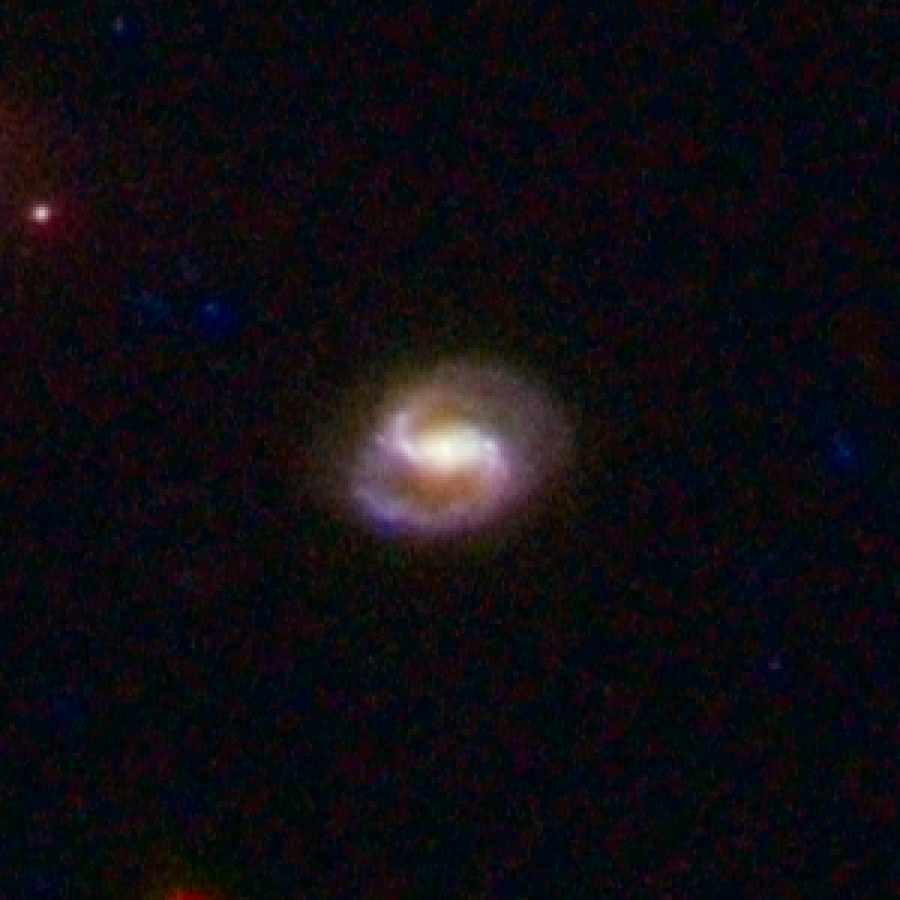

COSMOS Barred Spiral Galaxy 1705033

Barred spiral galaxy 1705033 is located 3.8 billion light-years away from Earth. The galaxy is part of a landmark study of more than 2,000 spiral galaxies from the largest galaxy census conducted by the Advanced Camera for Surveys aboard the NASA/ESA Hubble Space Telescope. The observations are part of the Cosmic Evolution Survey (COSMOS). Astronomers assembled this image from observations taken between fall 2003 and spring 2005 with Hubble and the Subaru Telescope in Mauna Kea, Hawaii.

Credit: NASA, ESA, K. Sheth (Spitzer Science Center, California Institute of Technology, Pasadena, California), and P. Capak and N. Scoville (California Institute of Technology)